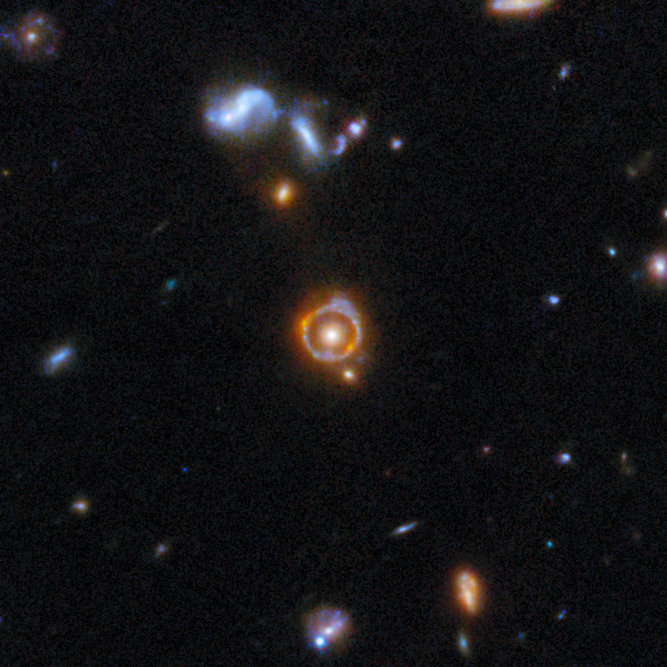

Gravitational lens COSJ100024+015334

Nicknamed ‘the COSMOS-Web Ring’, this lensing system contains a massive elliptical galaxy that acts as the gravitational lens and a more distant star-forming galaxy whose light has been stretched into a perfect circle. The lensed galaxy gives us a glimpse of galactic life when the Universe was just over a billion years old.

This gravitational lens is one of eight featured in the September 2025 Picture of the Month.

Credit: ESA/Webb, NASA & CSA, G. Gozaliasl, A. Koekemoer, M. Franco